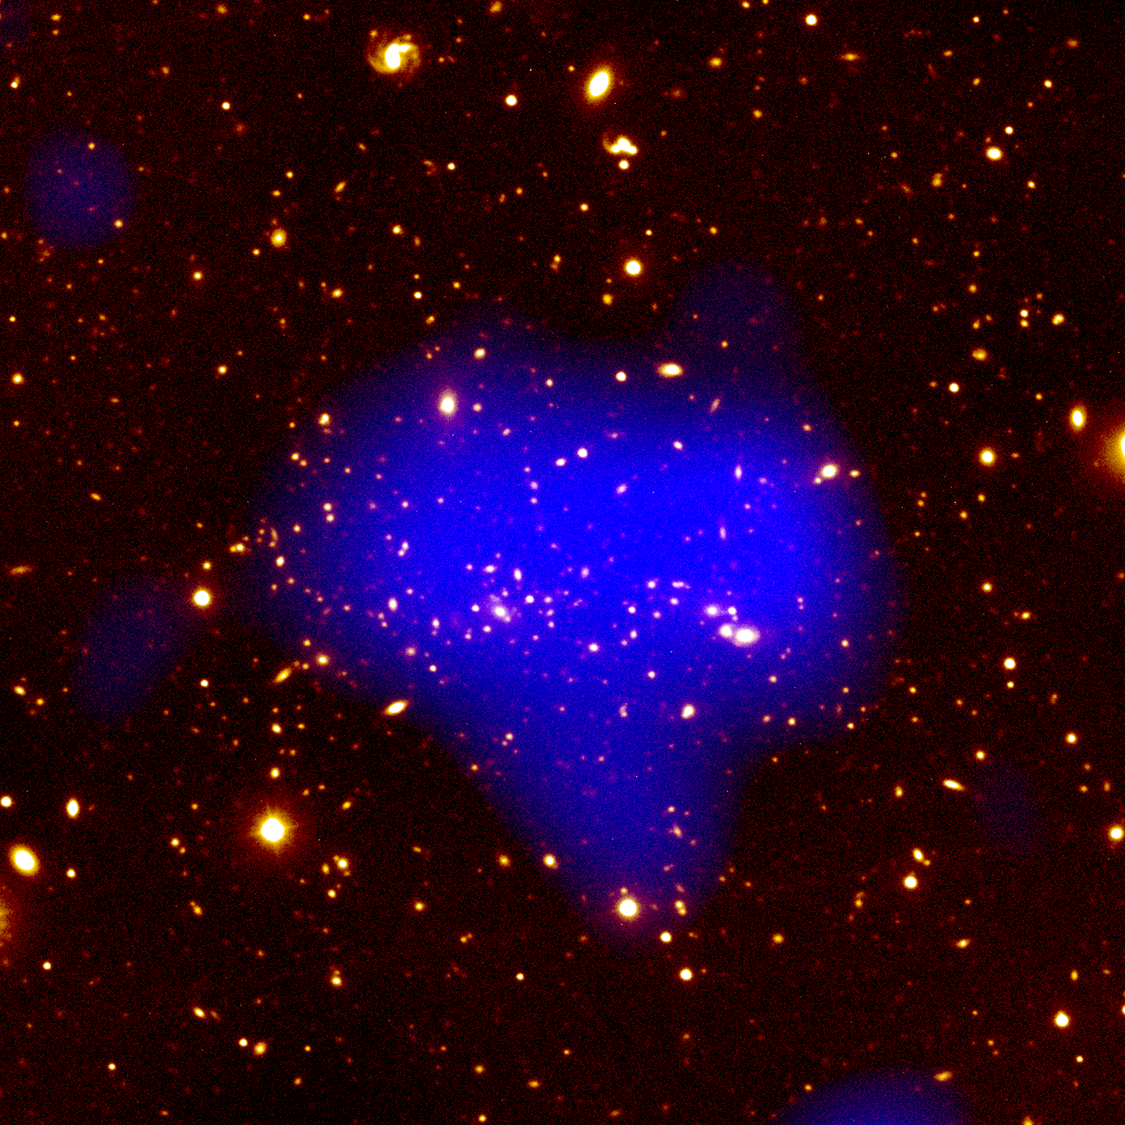

Telescopes Unveil View Of Remote, Massive Galaxy Cluster

This image is a colour composite taken by ground-based and X-ray observatories showing the entire galaxy cluster surrounded by background and foreground galaxies. The blue colour in the center of the image represents the huge amount of hot gas that fills the space between the galaxies in the cluster. This gas - colored blue - cannot be seen in visible light, but glows in X-ray frequencies. Astronomers have measured its temperature at 300 million degrees Fahrenheit. The X-ray information was used to estimate the cluster's total mass.

Credit: Isabella Gioia (Univ. of Hawaii), and NASA/ESA